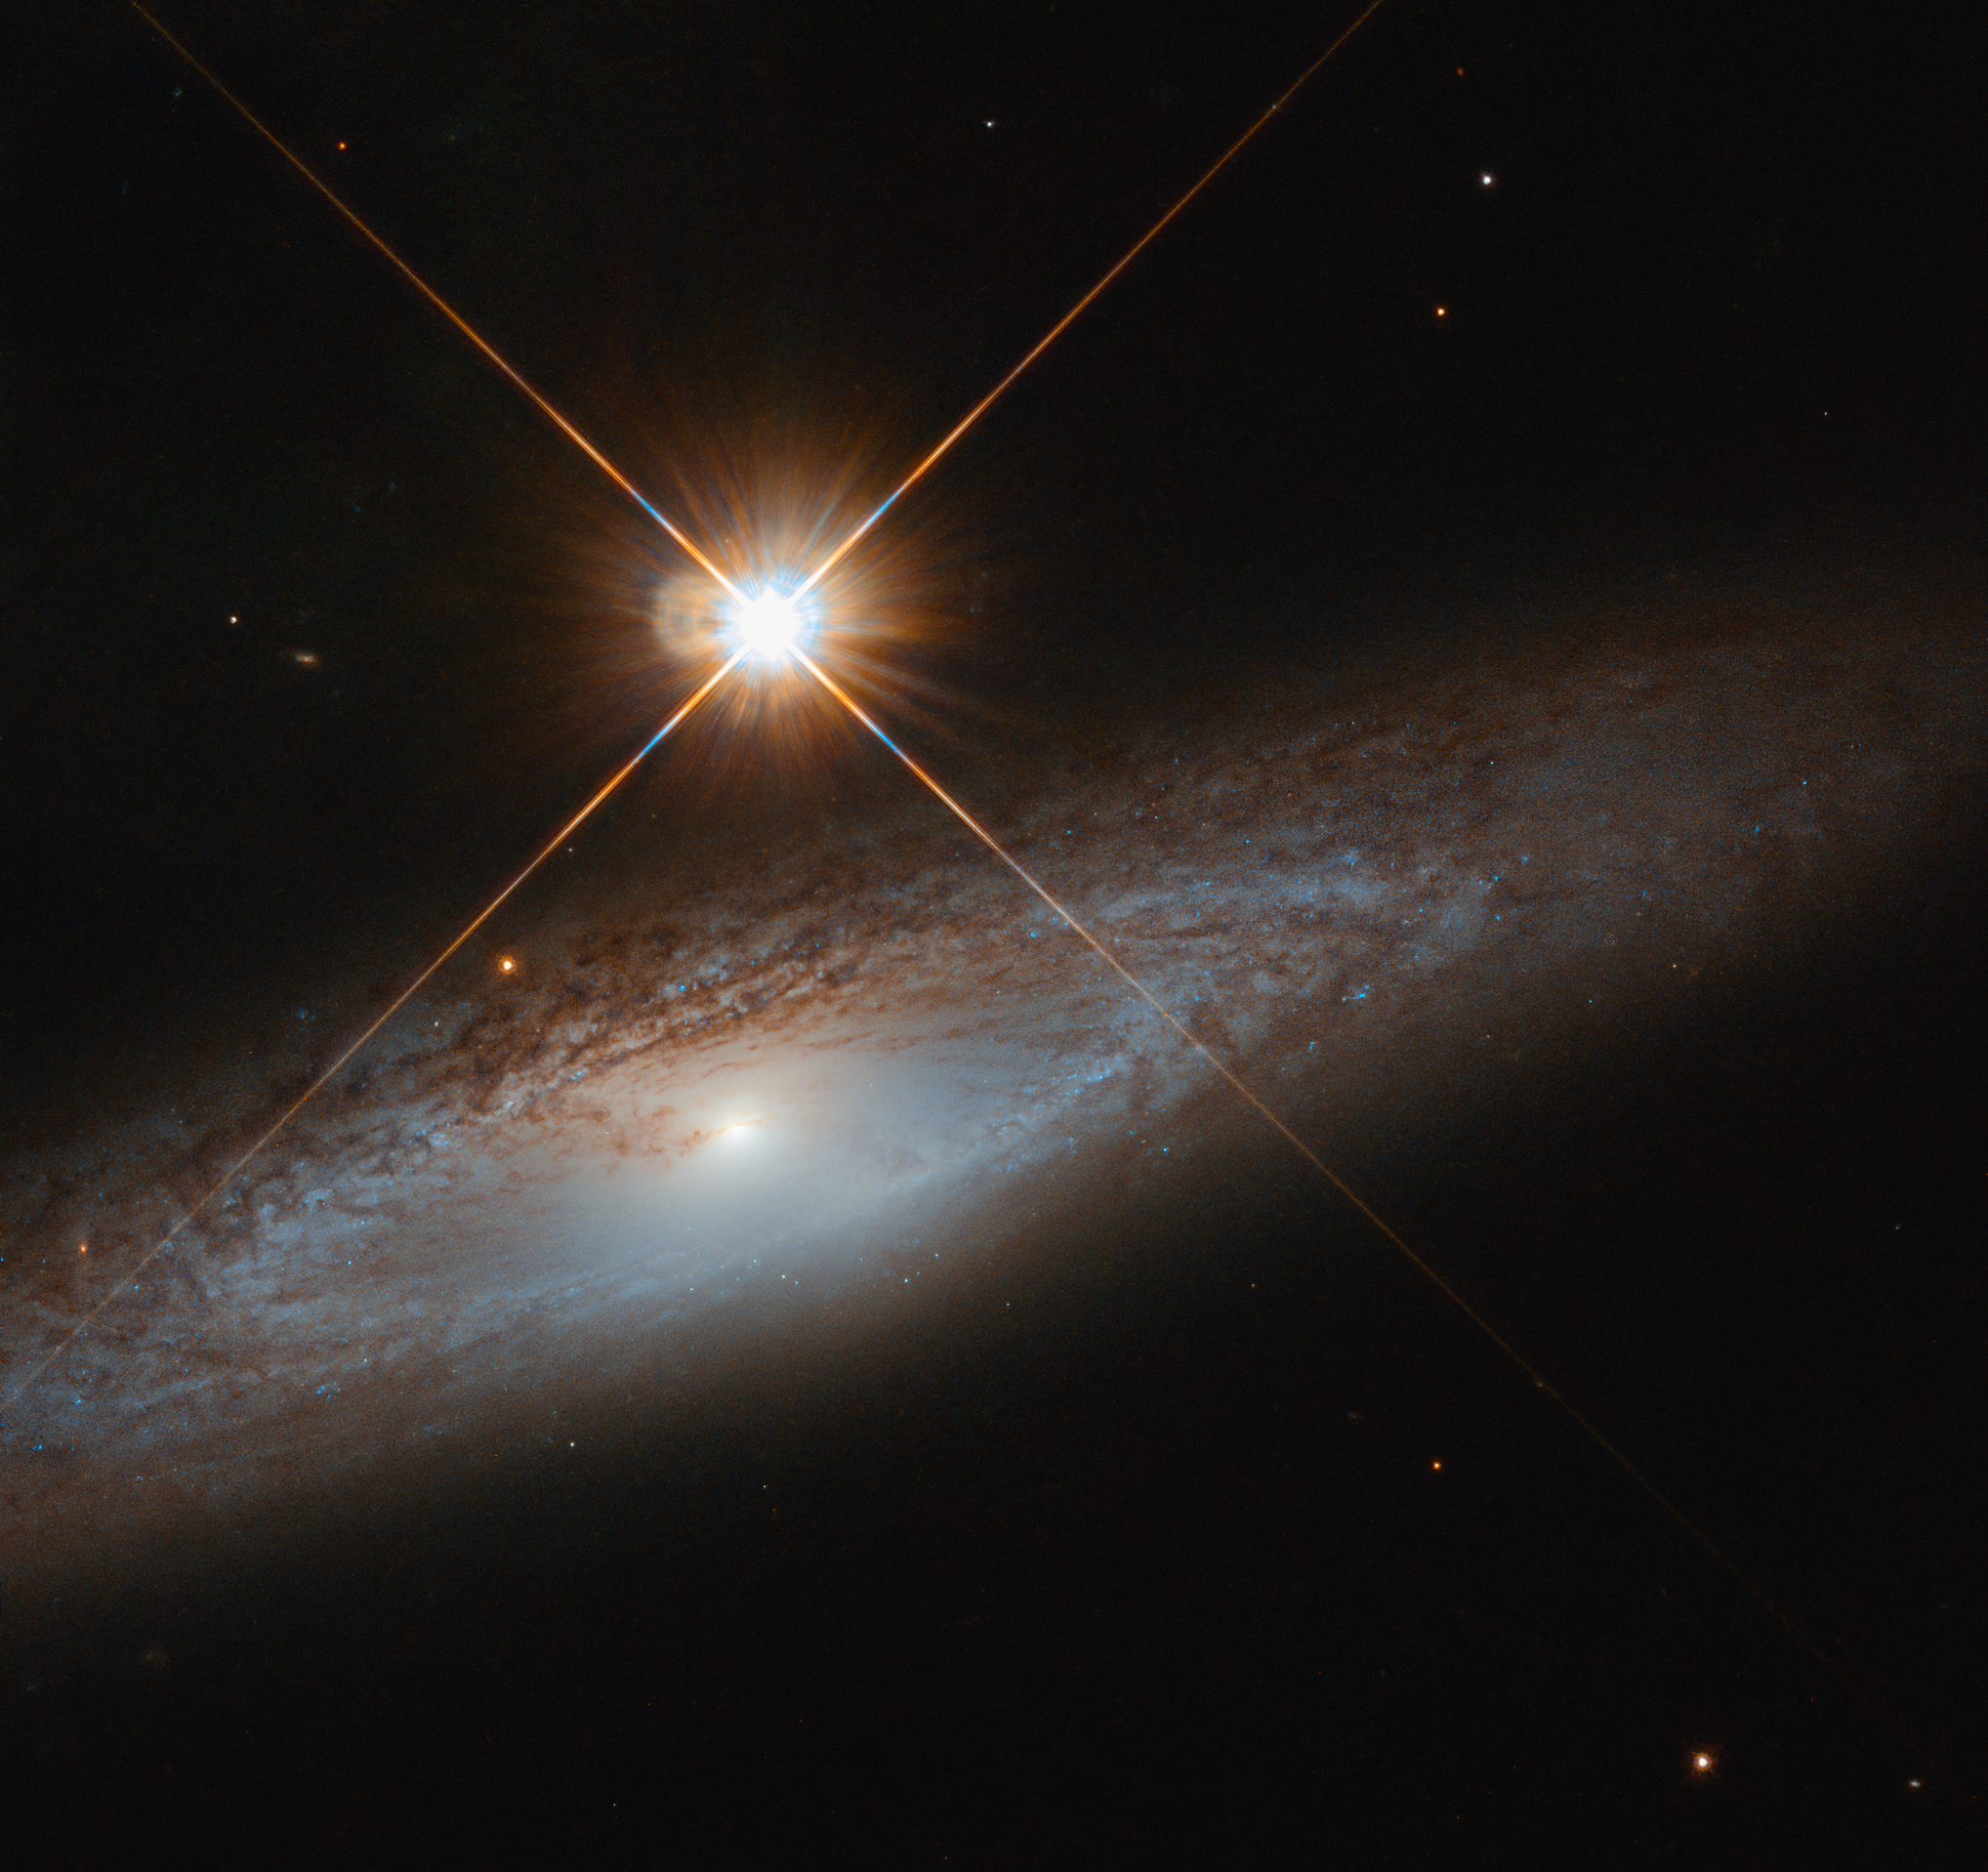

The Modest Galaxy

A bright foreground star isn’t enough to distract from the grandeur of the galaxy UGC 3855, captured here by the NASA/ESA Hubble Space Telescope. While this foreground star is incredibly bright to Hubble’s eye, it does not outshine the details of the background galaxy.

Many young blue stars are sprinkled throughout the circular patterns of UGC 3855’s arms, contrasted and complemented by dark lanes of dust also following the spiral structure. A glancing look at UGC 3855 may only leave you with an impression of the galaxy, but spare a moment longer and the intricacies of the galaxy begin to emerge. Located in the constellation of Lynx , UGC 3855 is a cosmic beauty to behold.

Credit: ESA/Hubble & NASA, J. Walsh